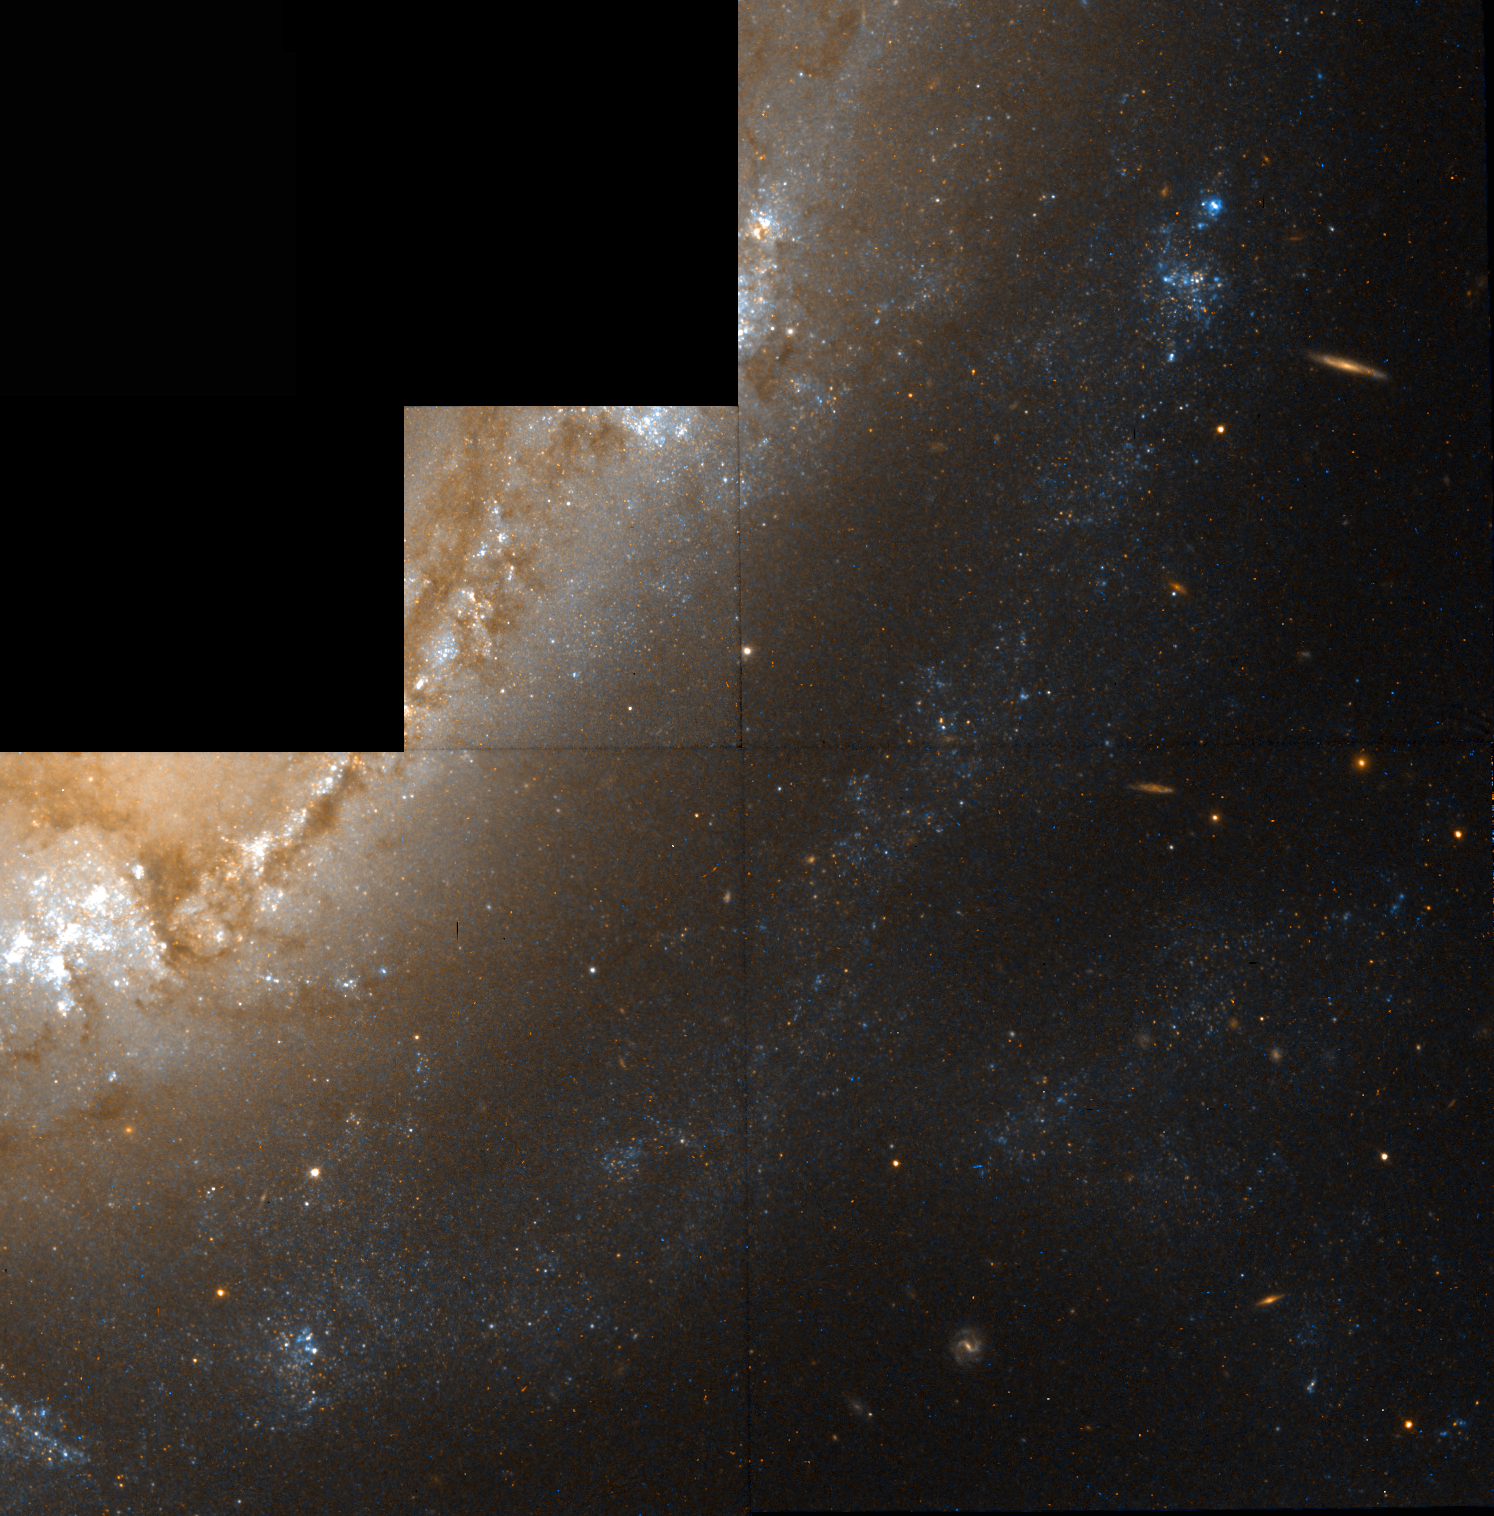

Galaxy NGC 1365

This colour image from the Hubble Space Telescope shows a region in NGC 1365, a barred spiral galaxy located in a cluster of galaxies called Fornax.

Credit: W. Freedman (Carnegie Observatories), the Hubble Space Telescope Key Project team, and NASA/ESA